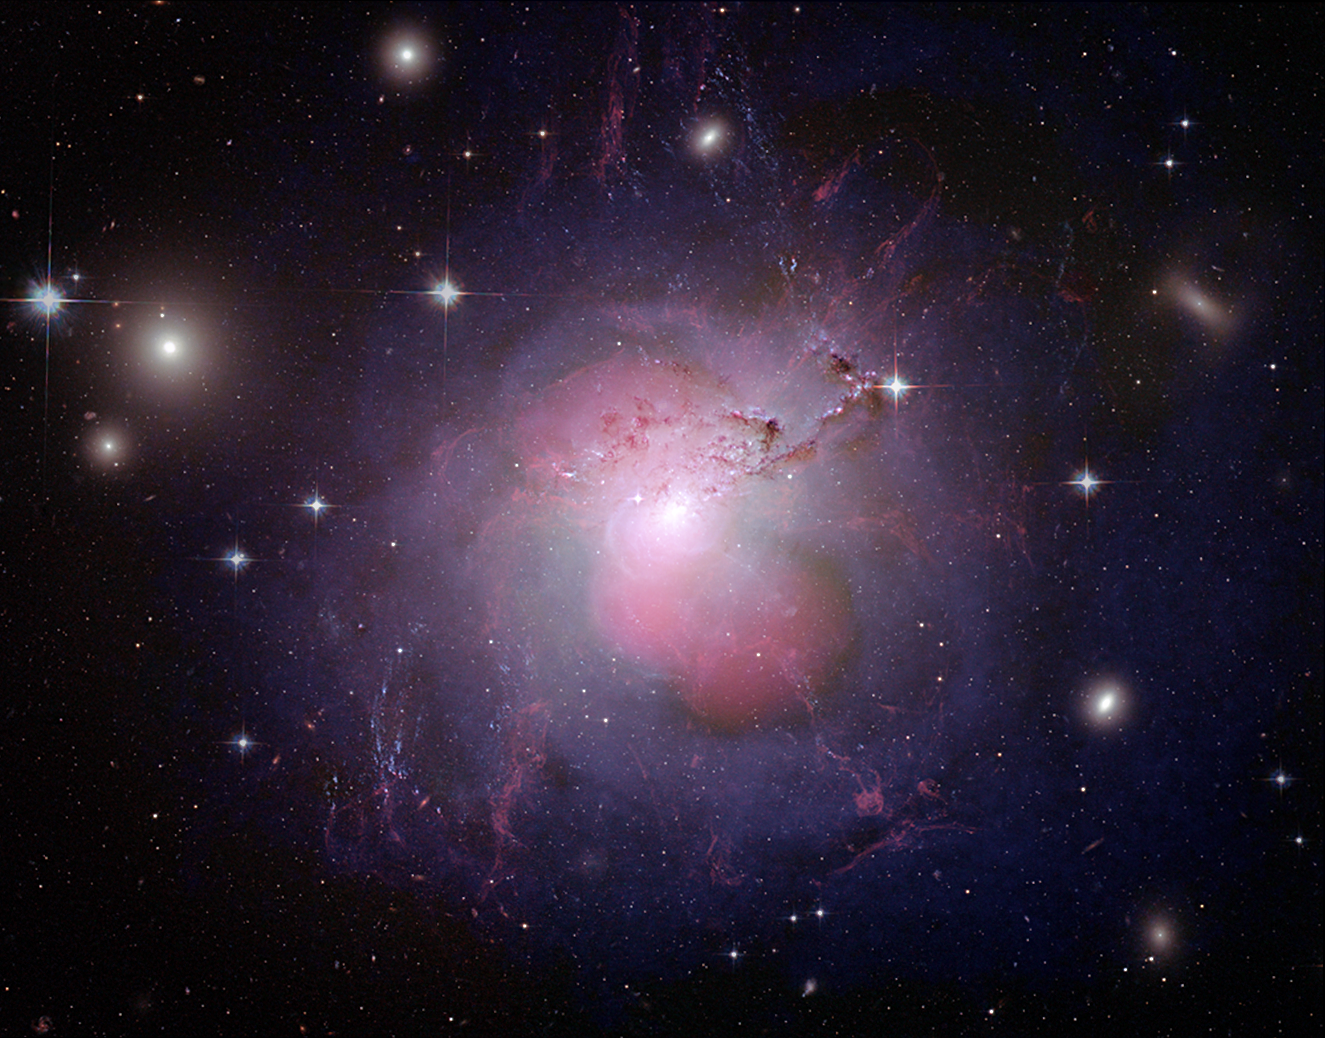

NGC 1275 multi-wavelength composite

The behemoth galaxy NGC 1275, also known as Perseus A, lies at the centre of Perseus Galaxy Cluster. By combining multi-wavelength images into this single composite, the dynamics of the galaxy become visible. Detail and structure from optical, radio and X-ray wavelengths have been combined for an aesthetically pleasing image which shows the violent events in the galaxy's heart. NGC 1275 is an active galaxy well-known for its radio source (Perseus A) and is a strong emitter of X-rays due to the presence of the supermassive black hole in its centre.

Hubble data from the Advanced Camera for Surveys covers visible-light wavelengths and is shown in the red, green and blue. Radio data from NRAO's Very Large Array at 0.91 m was also used. In this composite image, dust lanes, star-forming regions, hydrogen filaments, foreground stars, and background galaxies are contributions from the Hubble optical data. The X-ray data contributes to the soft but violet shells around the outside of the centre. The pinkish lobes toward the centre of the galaxy are from radio emission. The radio jets from the black hole fill the X-ray cavities. Chandra data from the ACIS covers X-ray wavelengths from 0.1771 to 4.133 nm (0.3-7 KeV).

Credit: NASA, ESA, NRAO and L. Frattare (STScI). Science Credit: X-ray: NASA/CXC/IoA/A.Fabian et al.; Radio: NRAO/VLA/G. Taylor; Optical: NASA, ESA, the Hubble Heritage (STScI/AURA)-ESA/Hubble Collaboration, and A. Fabian (Institute of Astronomy, University of Cambridge, UK)